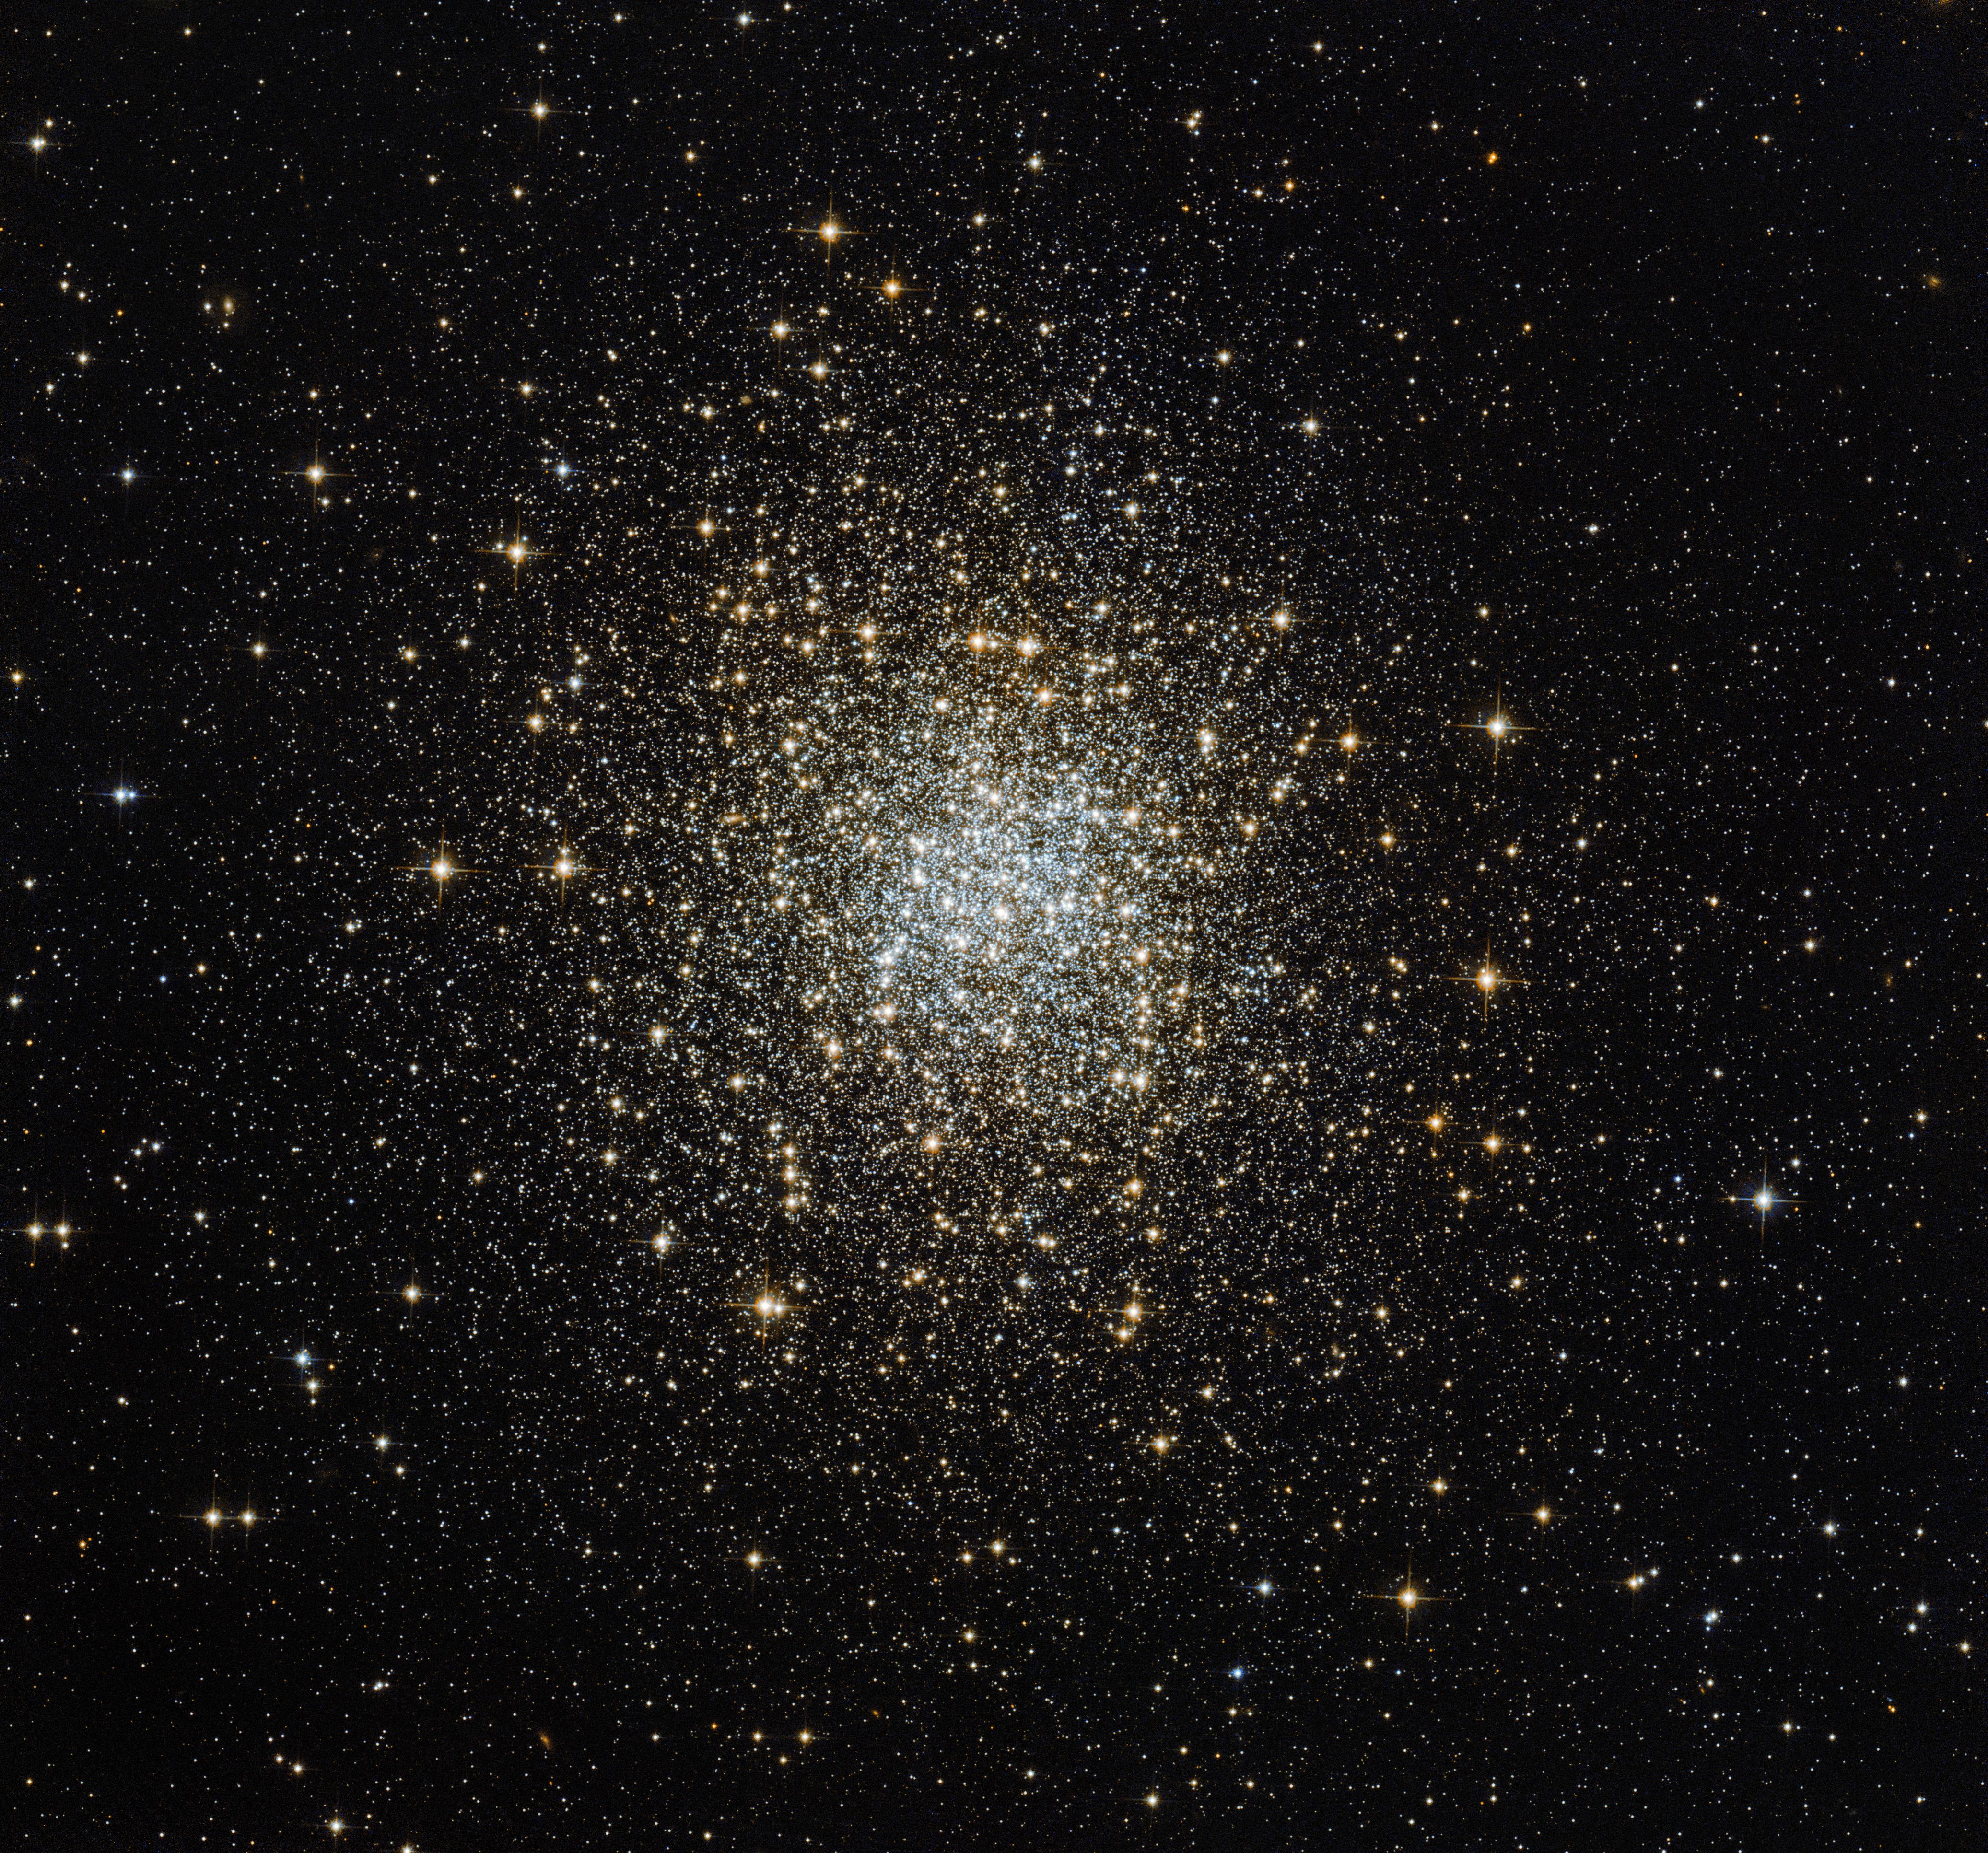

A unique cluster: one of the hidden 15

Globular clusters are relatively common in our sky, and generally look similar. However, this image, taken using the NASA/ESA Hubble Space Telescope, shows a unique example of such a cluster — Palomar 2.

Palomar 2 is part of a group of 15 globulars known as the Palomar clusters. These clusters, as the name suggests, were discovered in survey plates from the first Palomar Observatory Sky Survey in the 1950s, a project that involved some of the most well-known astronomers of the day, including Edwin Hubble. They were discovered quite late because they are so faint — each is either extremely remote, very heavily hidden behind blankets of dust, or has a very small number of remaining stars.

This particular cluster is unique in more than one way. For one, it is the only globular cluster that we see in this part of the sky, the northern constellation of Auriga (The Charioteer). Globular clusters orbit the centre of a galaxy like the Milky Way in the same way that satellites circle around the Earth. This means that they normally lie closer in to the galactic centre than we do, and so we almost always see them in the same region of the sky. Palomar 2 is an exception to this, as it is around five times further away from the centre of the Milky Way than other clusters. It also lies in the opposite direction — further out than Earth — and so it is classed as an “outer halo” globular.

It is also unusual due to its brightness. The cluster is veiled by a mask of dust, dampening the apparent brightness of the stars within it and making it appear as a very faint burst of stars. The stunning NASA/ESA Hubble Space Telescope image above shows Palomar 2 in a way that could not be captured from smaller or ground-based telescopes — some amateur astronomers with large telescopes attempt to observe all of the obscure and well-hidden Palomar 15 as a challenge, to see how many they can pick out from the starry sky.

Credit: ESA/Hubble & NASA